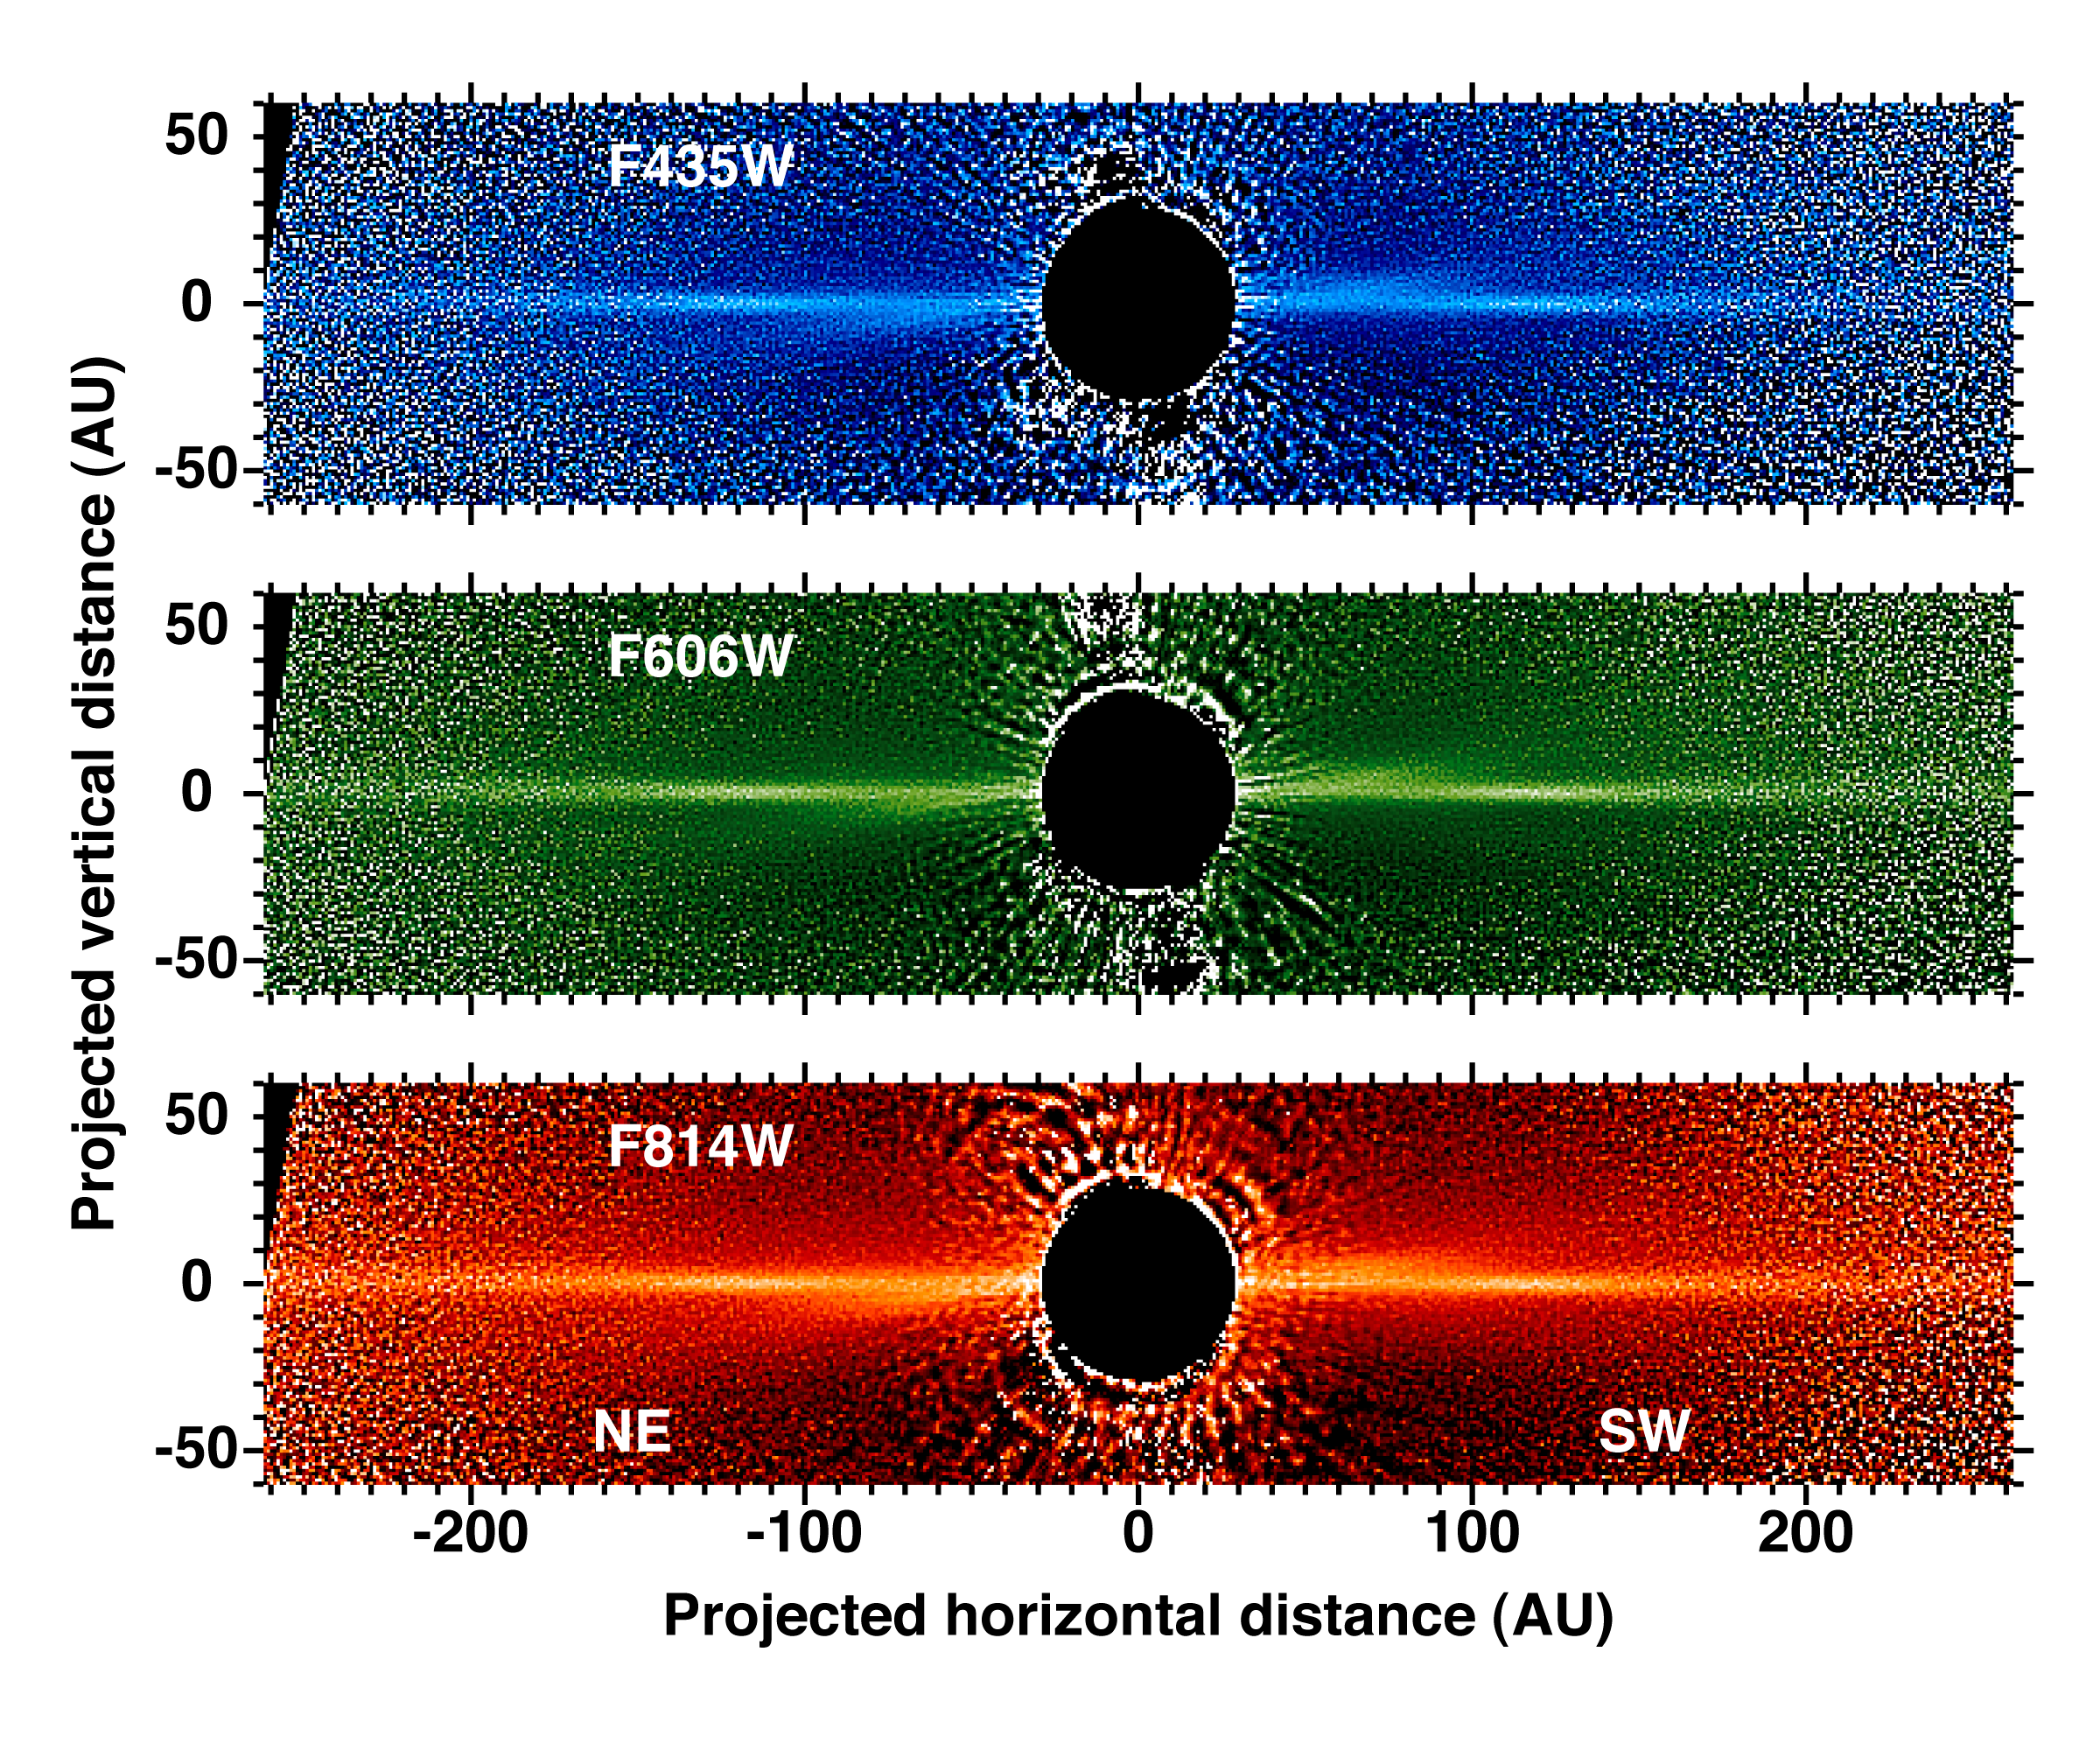

Beta Pictoris - Multi-Band Images of Beta Pictoris

Detailed images of the nearby star Beta Pictoris, taken by NASA/ESA Hubble Space Telescope, confirm the existence of not one but two dust disks encircling the star. The images offer tantalizing new evidence for at least one Jupiter-size planet orbiting Beta Pictoris.

The finding ends a decade of scientific speculation that an odd warp in the young star's debris disk may actually be another inclined disk. The recent Hubble Advanced Camera for Surveys view - the best visible-light image of Beta Pictoris - clearly shows a distinct secondary disk that is tilted by about 4 degrees from the main disk. The secondary disk is visible out to roughly 24 billion miles (almost 40 billion kilometres) from the star, and probably extends even farther, said astronomers. This Hubble image of Beta Pictoris clearly shows a primary dust disk and a much fainter secondary dust disk. Astronomers used the Advanced Camera's coronagraph to block out the light from the bright star.

Credit: NASA, ESA and D. Golimowski (Johns Hopkins University)